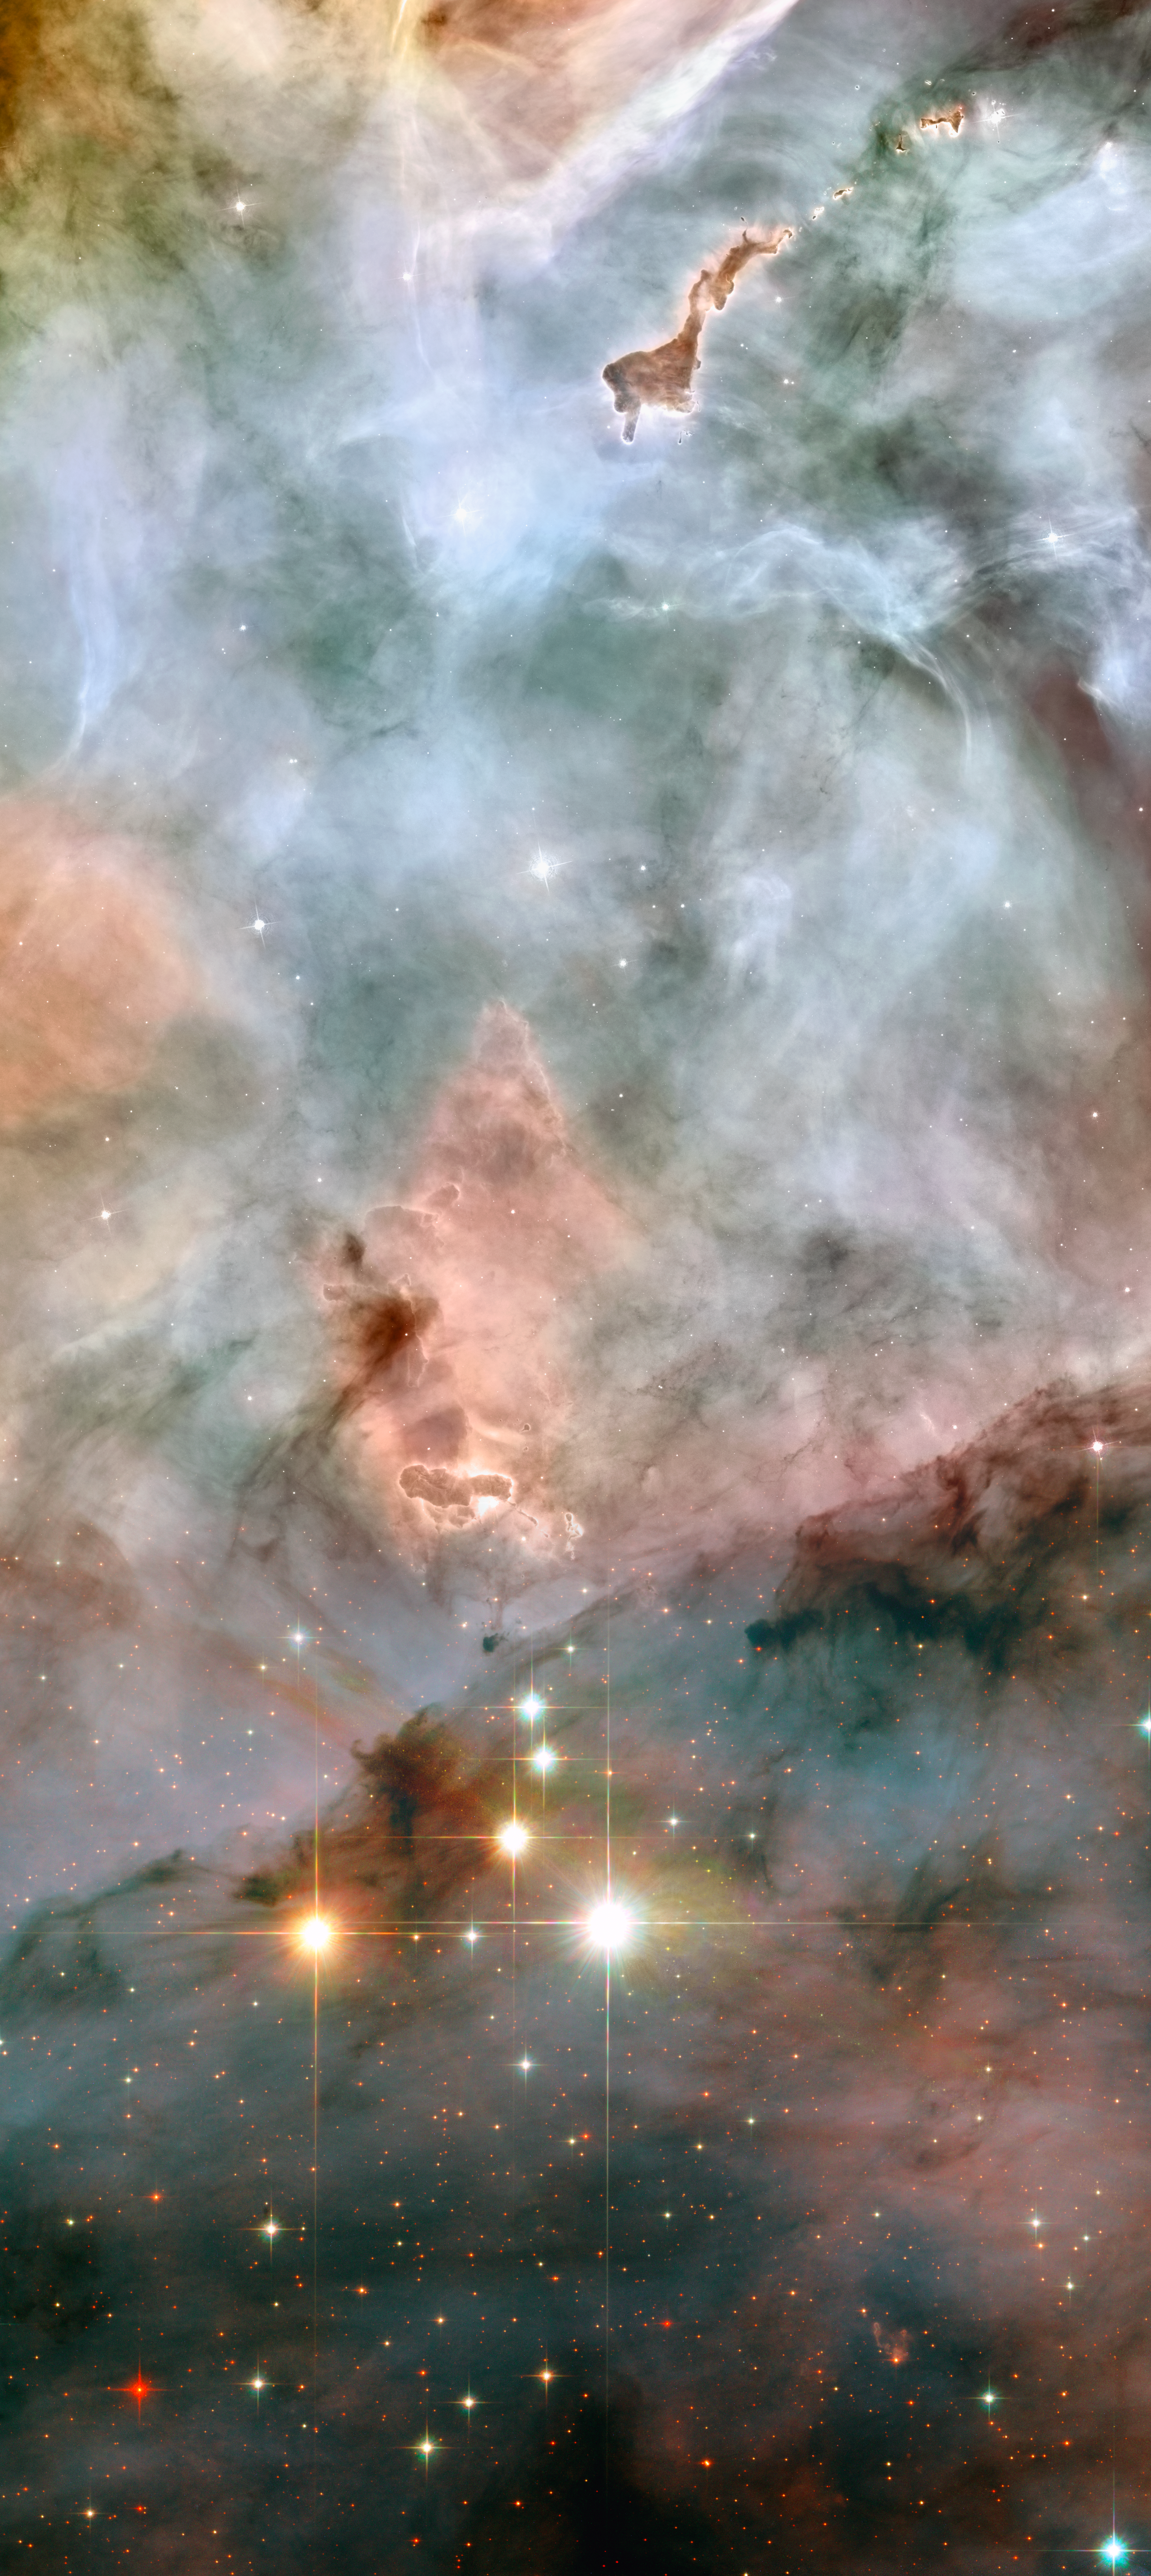

Wide-field image showing the region of WR 25 and Tr16-244

WR 25 and Tr16-244, at the bottom of the image, are located within the open cluster Trumpler 16. This cluster is embedded within the Carina Nebula, an immense cauldron of gas and dust that lies approximately 7500 light-years from Earth in the constellation of Carina, the Keel. At the top of the image, a peculiar nebula with the shape of a "defiant" finger points towards WR25 and Tr16-244.

Credit: NASA, ESA and Jesús Maíz Apellániz (Instituto de Astrofísica de Andalucía, Spain)